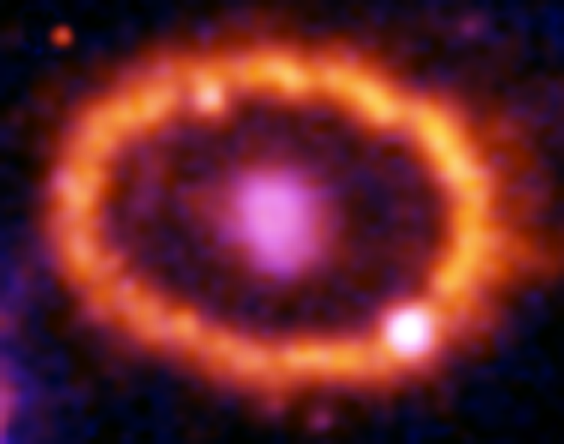

Hubble Supernova 1987A Scrapbook (1994-2003) - Image 5

in 1987, astronomers spotted the brightest stellar explosion ever seen since the one observed by Johannes Kepler over 400 years ago. Called SN 1987A, the titanic supernova explosion blazed with the power of 100,000,000 suns for several months following its discovery on Feb. 23 of that year. Although the supernova itself is over a million times fainter than when it was first discovered, a new light show in the space surrounding it is just beginning.

Credit: NASA/ESA, P. Challis, R. Kirshner (Harvard-Smithsonian Center for Astrophysics) and B. Sugerman (STScI)